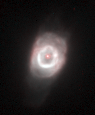

NGC 6790

This image is a part of the Hubble Gallery of Planetary Nebulae.

Credit: Howard Bond (ST ScI) and NASA/ESA